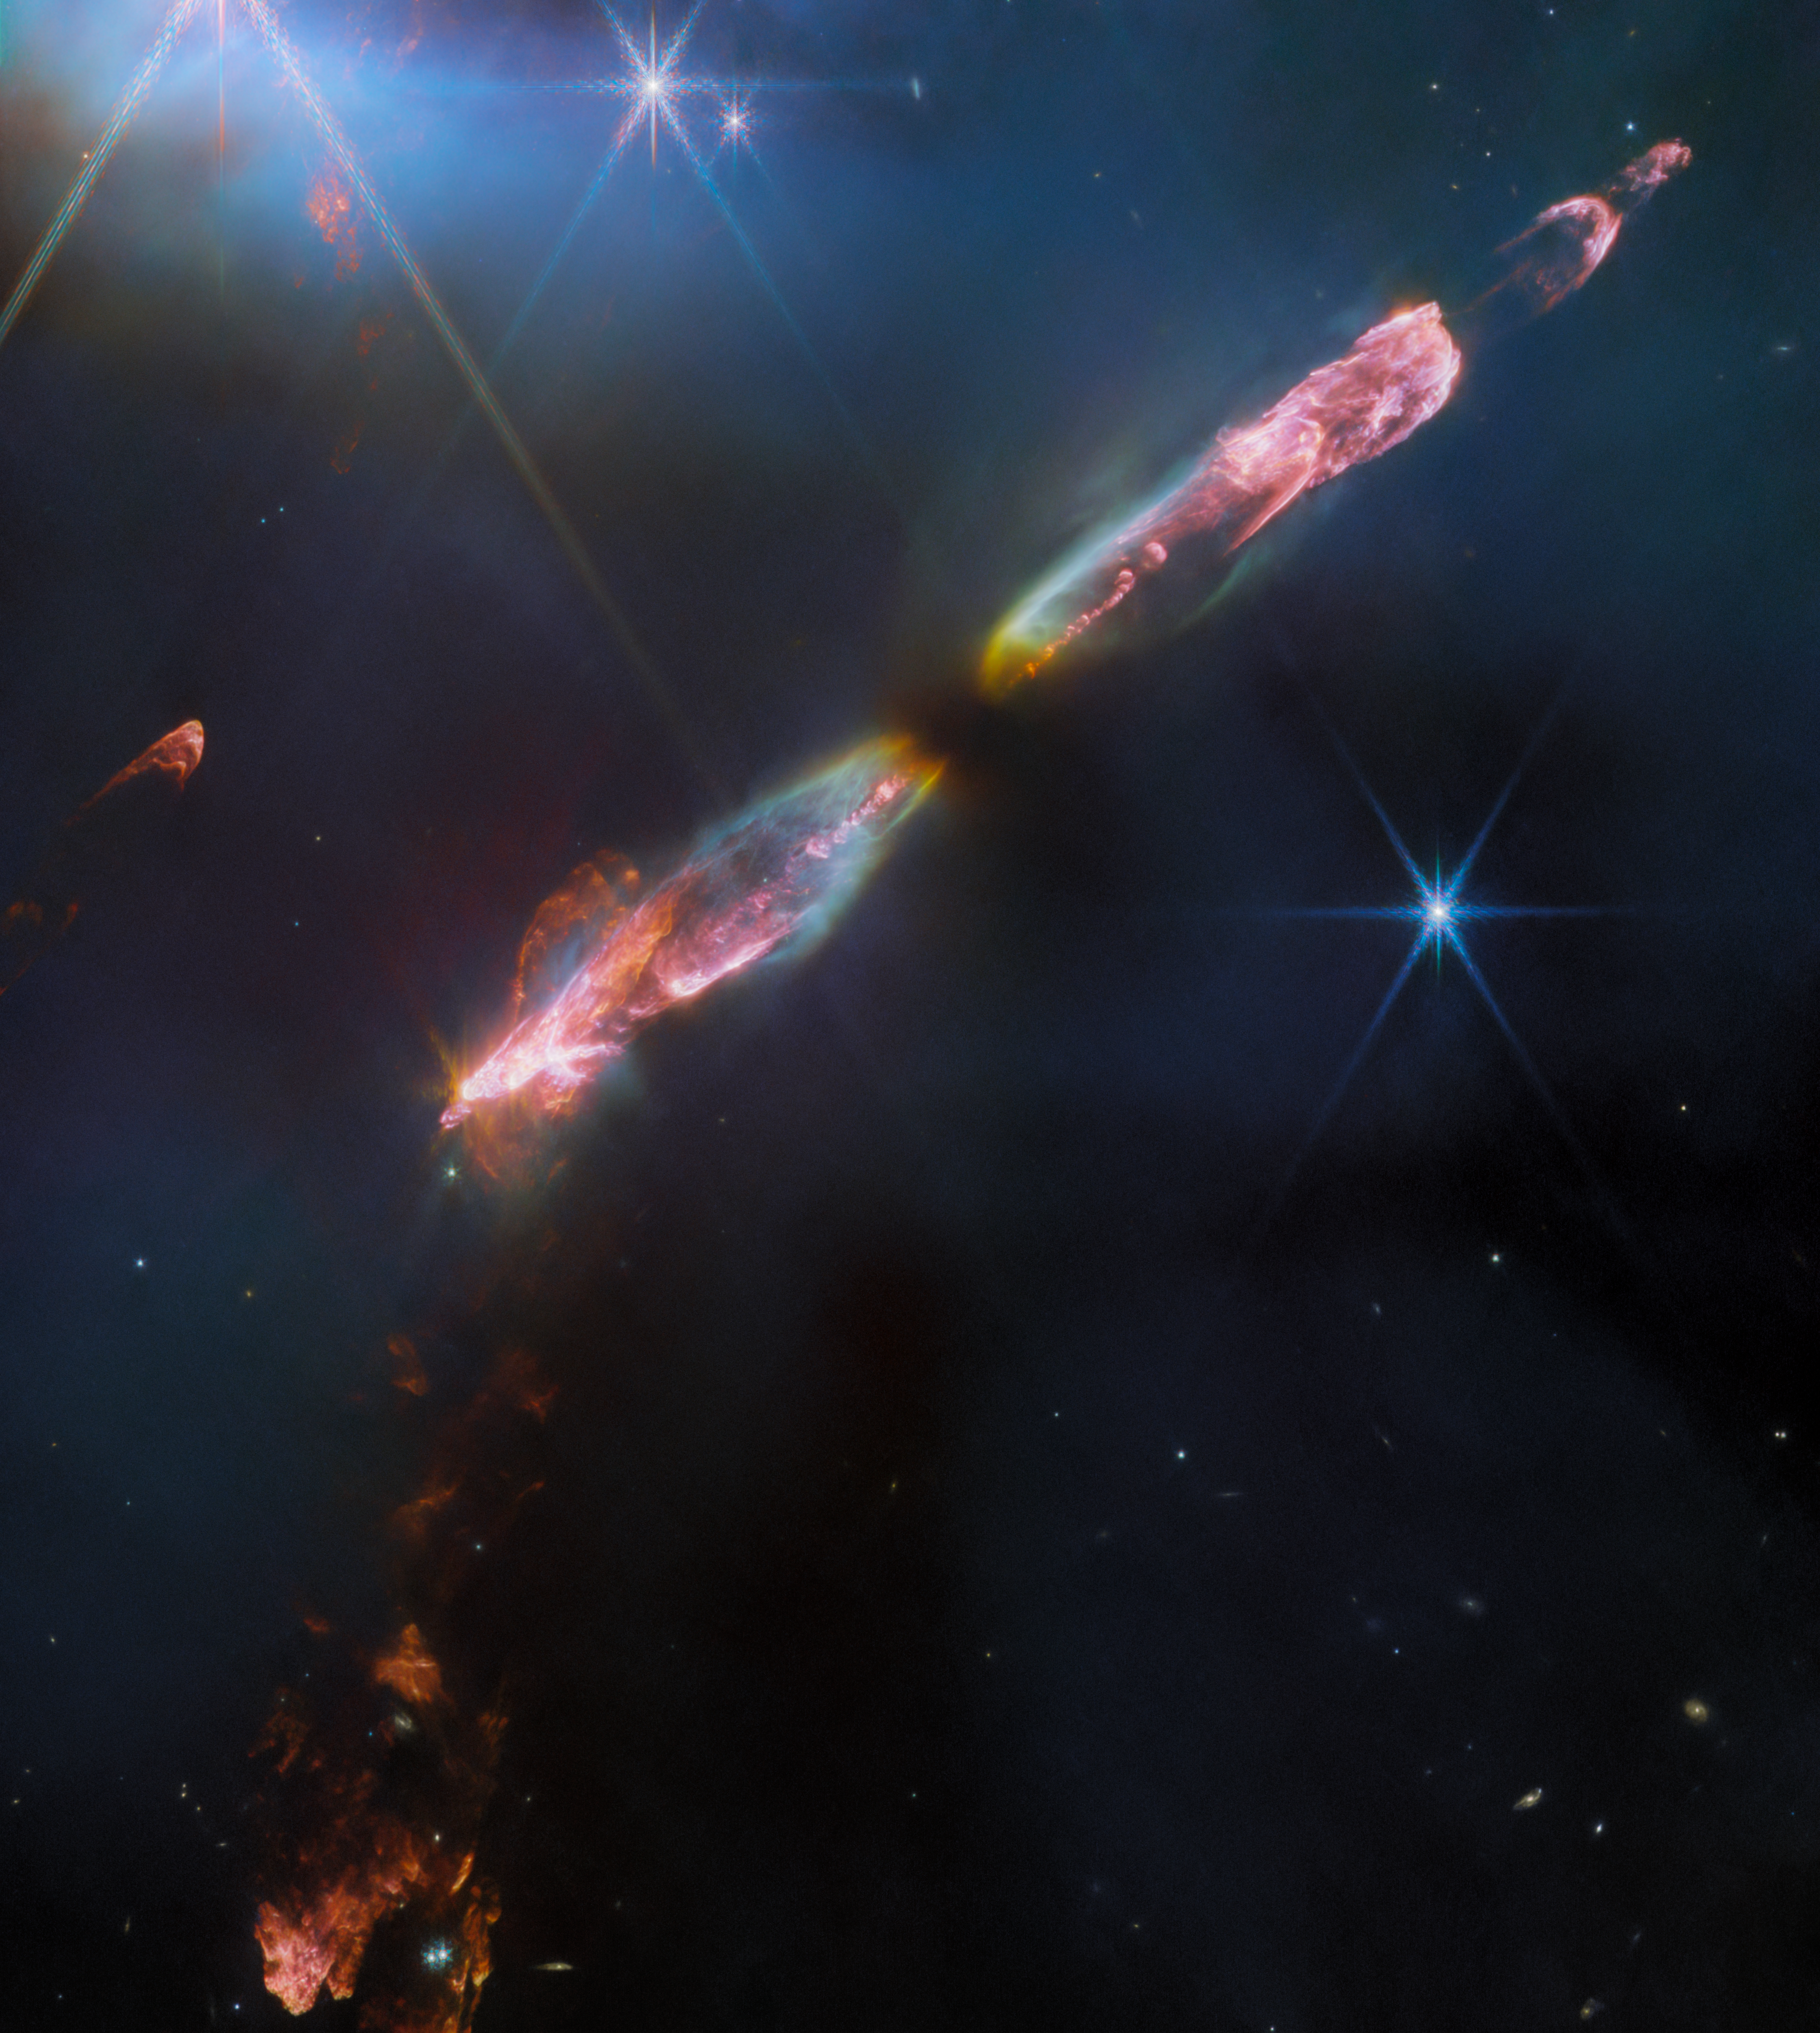

HH 211 (NIRCam image)

Featured in this image from the NASA/ESA/CSA James Webb Space Telescope is Herbig-Haro 211 (HH 211), a bipolar jet travelling through interstellar space at supersonic speeds. At roughly 1,000 light-years away from Earth in the constellation Perseus, the object is one of the youngest and nearest protostellar outflows, making it an ideal target for Webb.

Herbig-Haro objects are luminous regions surrounding newborn stars, and are formed when stellar winds or jets of gas spewing from these newborn stars form shockwaves colliding with nearby gas and dust at high speeds. This spectacular image of HH 211 reveals an outflow from a Class 0 protostar, an infantile analogue of our Sun when it was no more than a few tens of thousands of years old and with a mass only 8% of the present-day Sun (it will eventually grow into a star like the Sun).

Infrared imaging is powerful in studying newborn stars and their outflows, because such stars are invariably still embedded within the gas from the molecular cloud in which they formed. The infrared emission of the star’s outflows penetrates the obscuring gas and dust, making a Herbig-Haro object like HH 211 ideal for observation with Webb’s sensitive infrared instruments. Molecules excited by the turbulent conditions, including molecular hydrogen, carbon monoxide and silicon monoxide, emit infrared light that Webb can collect to map out the structure of the outflows.

The image showcases a series of bow shocks to the southeast (lower-left) and northwest (upper-right) as well as the narrow bipolar jet that powers them in unprecedented detail — roughly 5 to 10 times higher spatial resolution than any previous images of HH 211. The inner jet is seen to “wiggle” with mirror symmetry on either side of the central protostar. This is in agreement with observations on smaller scales and suggests that the protostar may in fact be an unresolved binary star.

Credit: ESA/Webb, NASA, CSA, T. Ray (Dublin Institute for Advanced Studies)